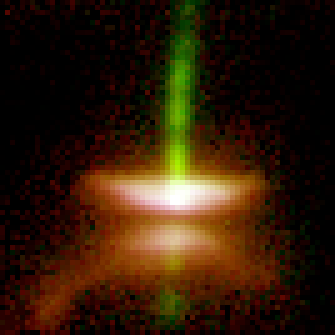

Disk Around Young Star. A View of HH 30

This Wide Field and Planetary Camera 2(WFPC2) image shows Herbig-Haro 30 (HH 30), the prototype of a young star surrounded by a thin, dark disk and emitting powerful gaseous jets. The disk extends 40 billion miles (about 64 billion kilometres) from left to right in the image, dividing the nebula in two. The central star is hidden from direct view, but its light reflects off the upper and lower surfaces of the disk to produce the pair of reddish nebulae. The gas jets are shown in green.

Credit: Chris Burrows (STScI), the WFPC2 Science Team and NASA/ESA